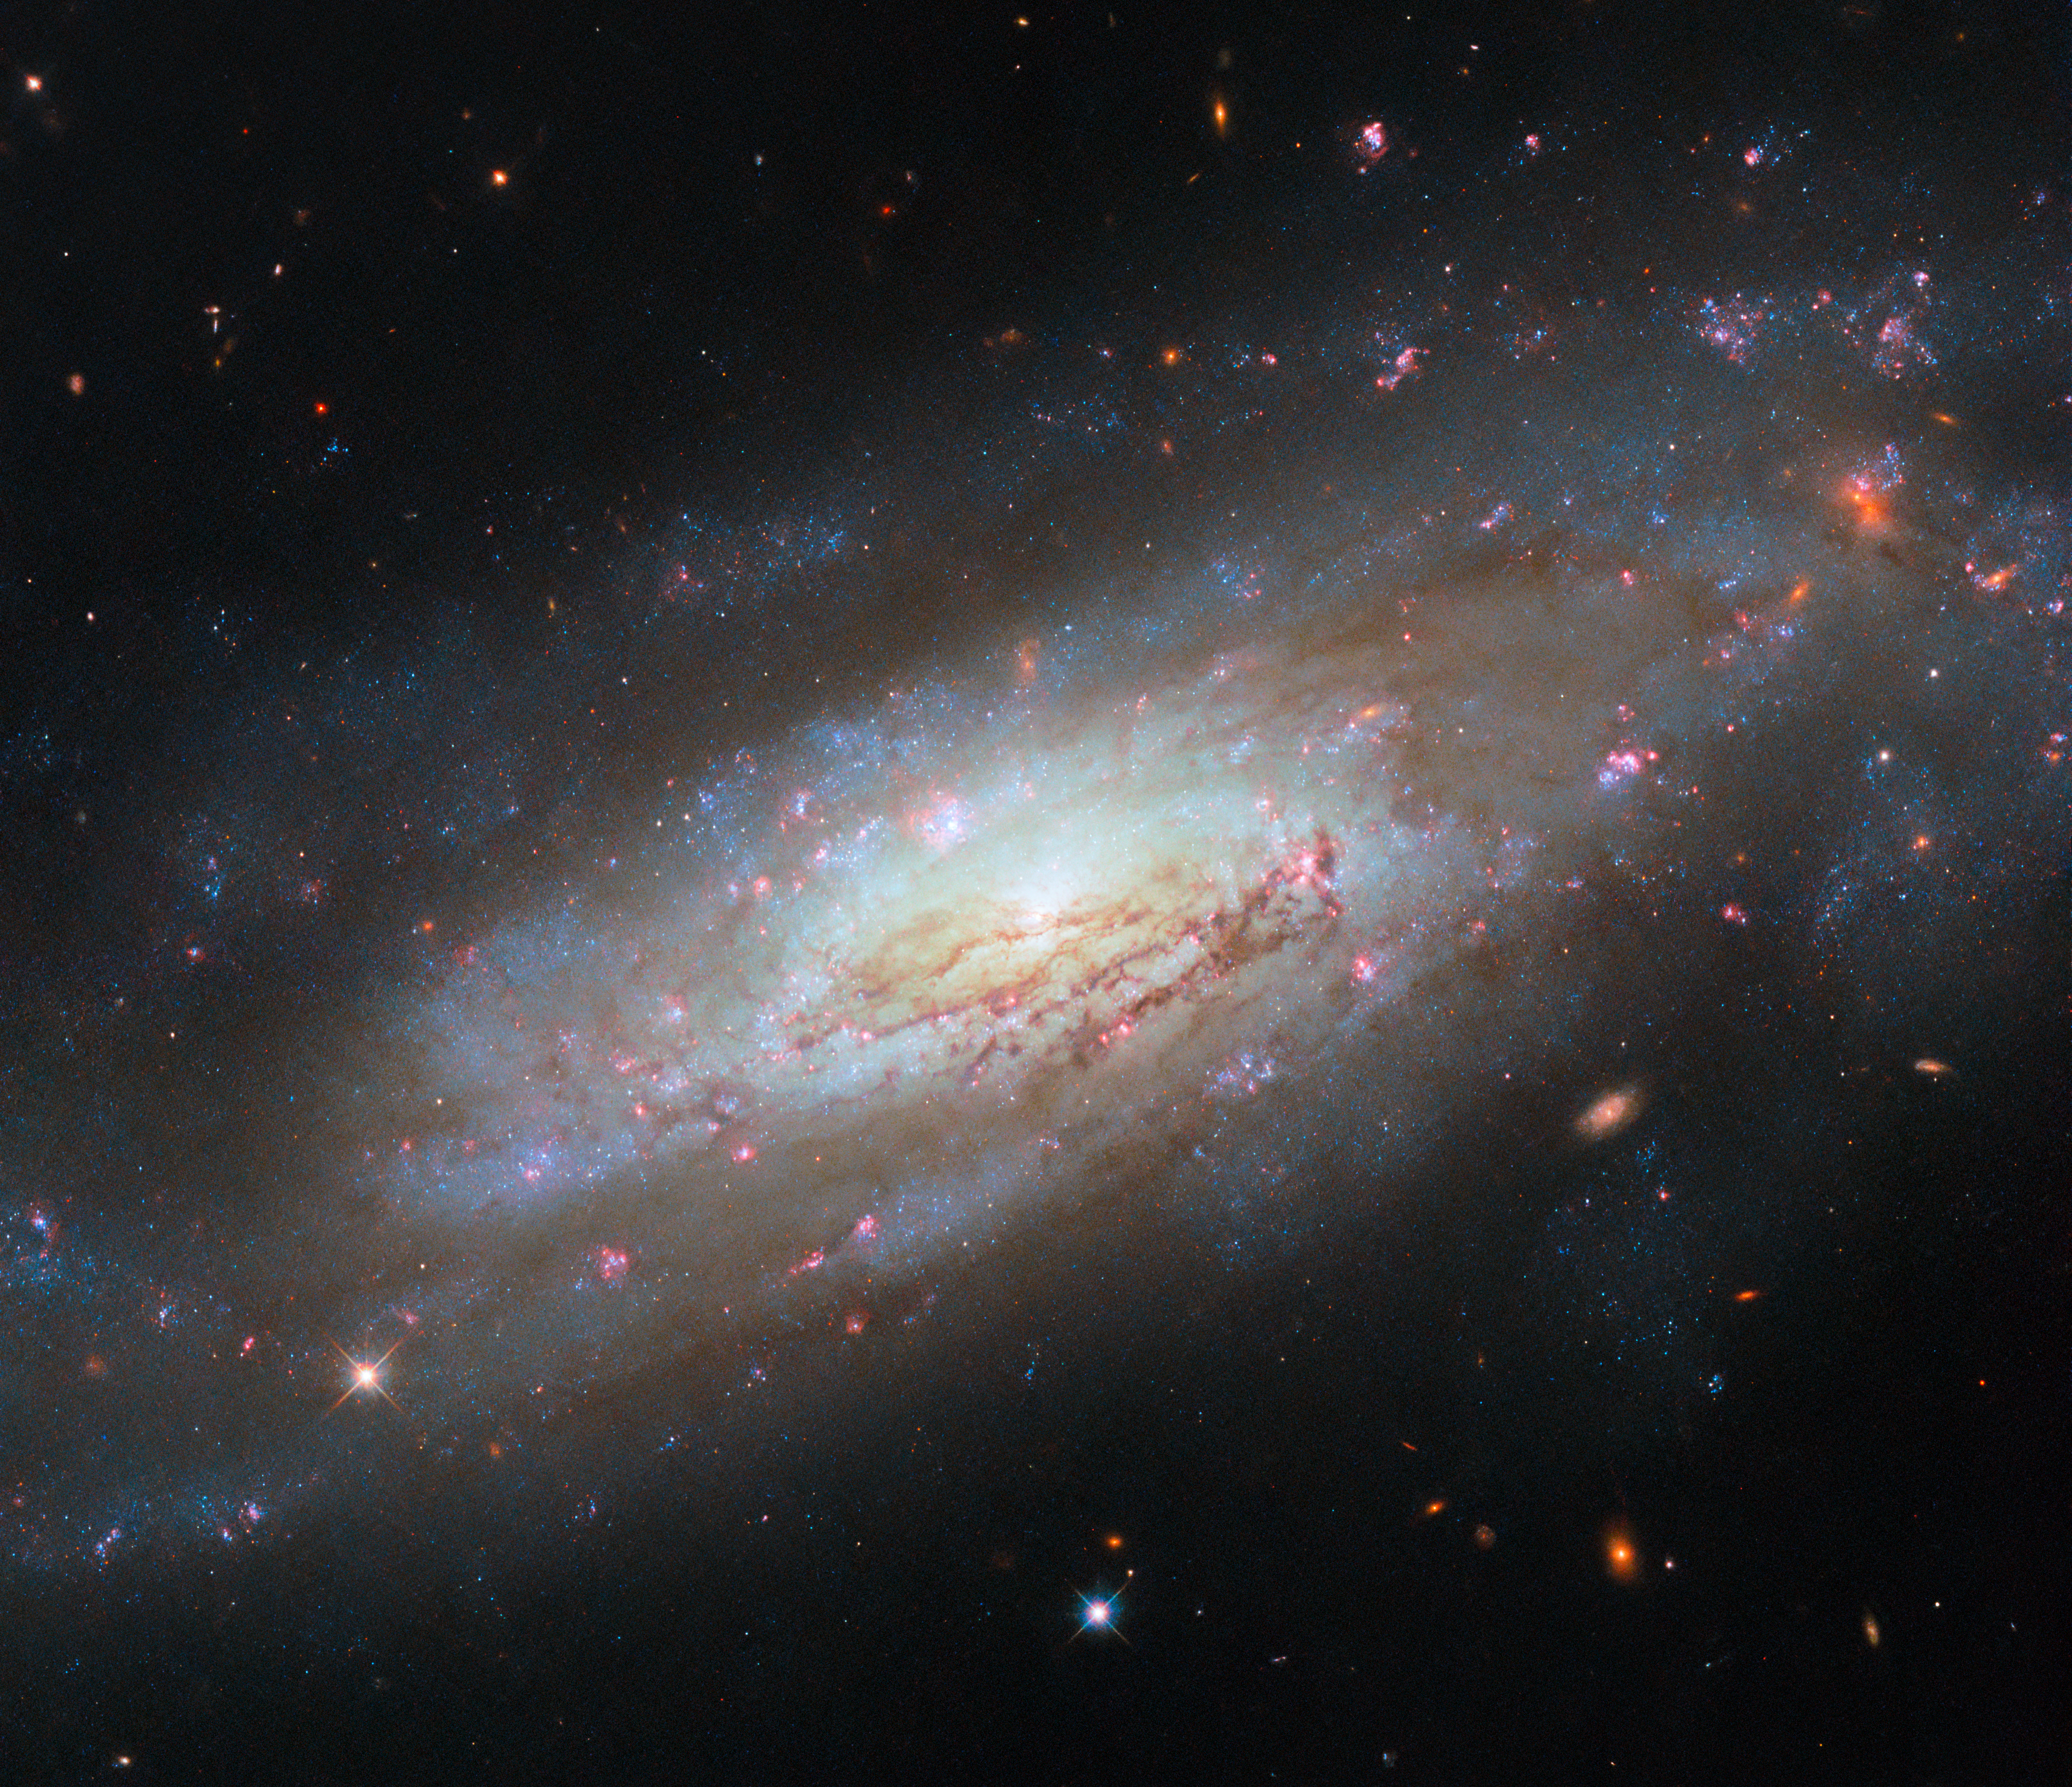

A maelstrom of matter and energy

This Picture of the Week from the NASA/ESA Hubble Space Telescope depicts the galaxy NGC 4951, a spiral galaxy that’s located 49 million light-years from Earth in the constellation Virgo.

The data used to make this image were captured by Hubble as part of a programme to examine how matter and energy travel in nearby galaxies. Galaxies continuously undergo a cycle of star formation whereby the gas in a galaxy forms molecular clouds, which collapse to create new stars, which then disperse the clouds they formed from with powerful radiation or stellar winds in a process called feedback. The remaining gas is left to form new clouds elsewhere. This cycle of moving matter and energy determines how fast a galaxy forms stars and how quickly it burns through its supplies of gas — that is, how it evolves over the course of its life. Understanding this evolution depends on the nebulae, stars and star clusters in the galaxy: when they formed and their past behaviour. Hubble has always excelled at measuring populations of stars, and the task of tracking gas and star formation in galaxies including NGC 4951 is no exception.

NGC 4951 is also a Seyfert galaxy, a type of galaxy that has a very bright and energetic nucleus called an active galactic nucleus. This image demonstrates well how energetic the galaxy is, and some of the dynamic galactic activity which transports matter and energy throughout it: a shining core surrounded by swirling arms, glowing pink star-forming regions, and thick dust.

Credit: ESA/Hubble & NASA, D. Thilker, M. Zamani (ESA/Hubble)